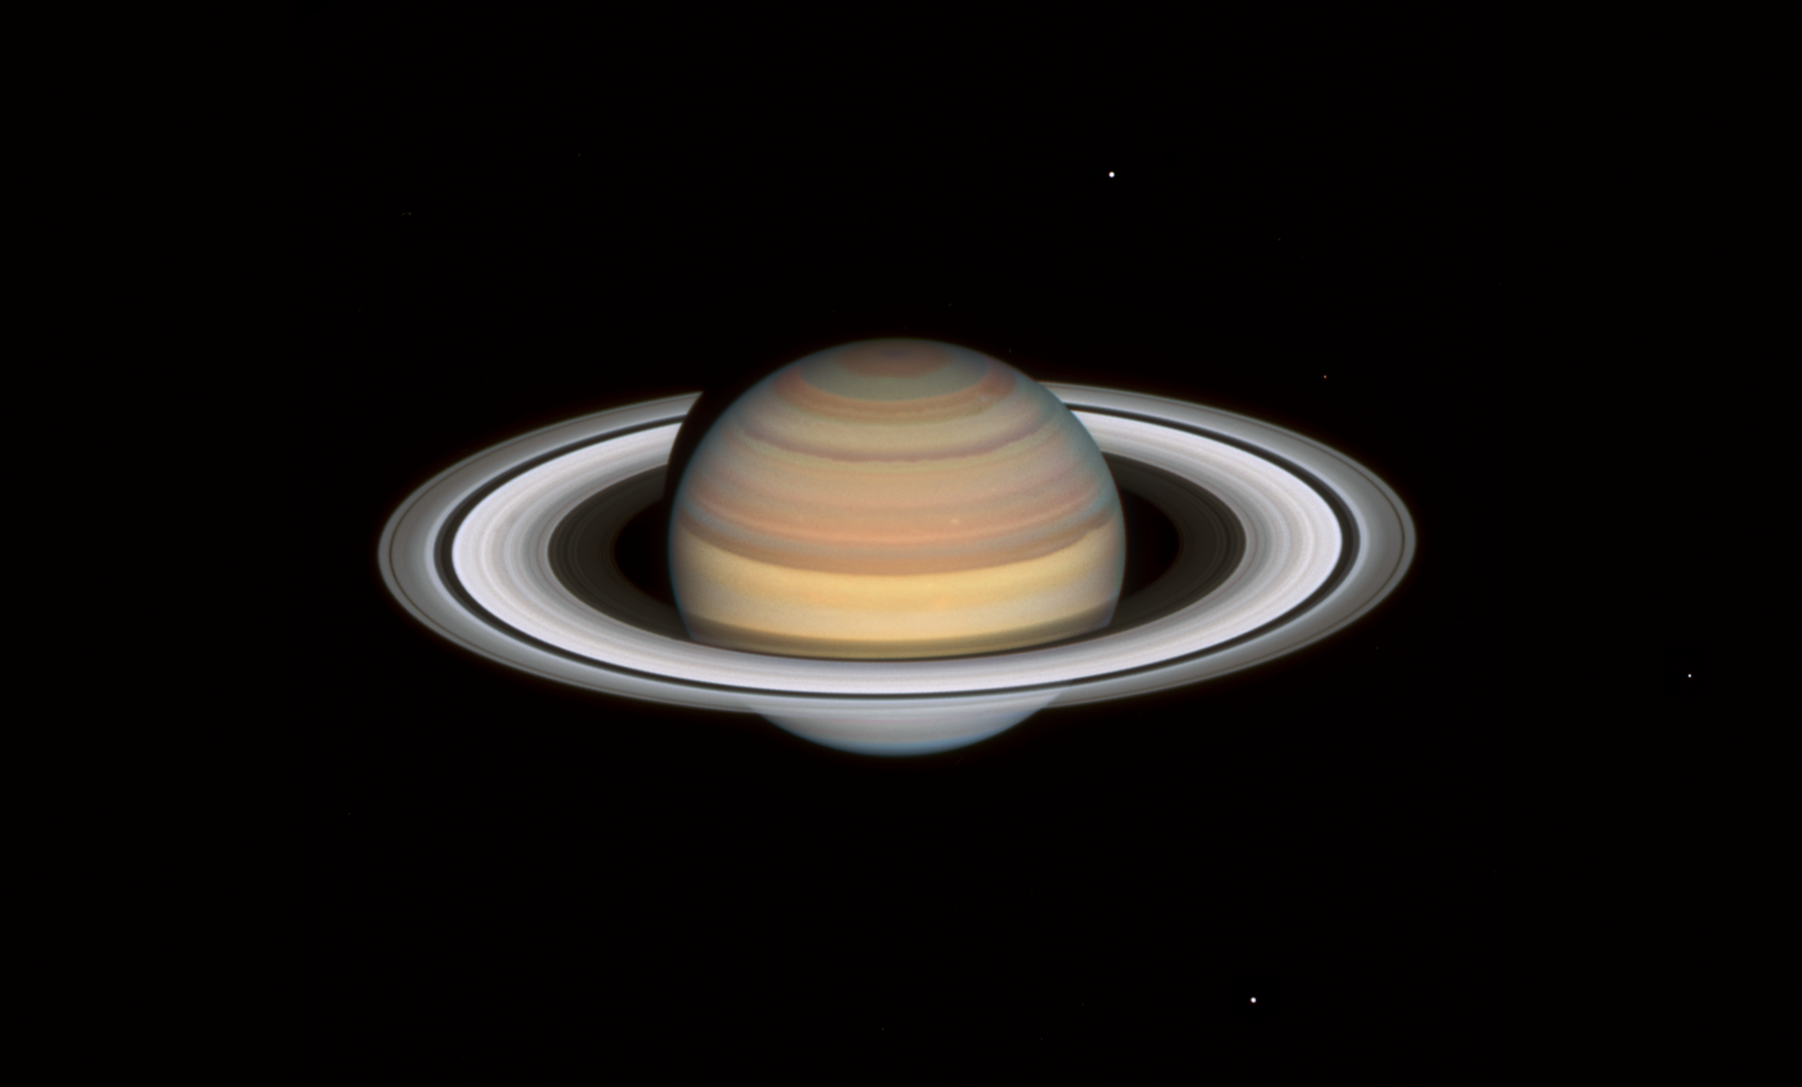

Hubble’s Observation of Saturn in 2021

Hubble’s new look at Saturn on 12 September 2021 shows rapid and extreme colour changes in the bands in the planet’s northern hemisphere, where it is now early autumn. The bands have varied throughout Hubble observations in both 2019 and 2020. Hubble’s Saturn image catches the planet following the southern hemisphere’s winter, evident in the lingering blue-ish hue of the south pole.

Credit: NASA, ESA, A. Simon (Goddard Space Flight Center), and M.H. Wong (University of California, Berkeley) and the OPAL team